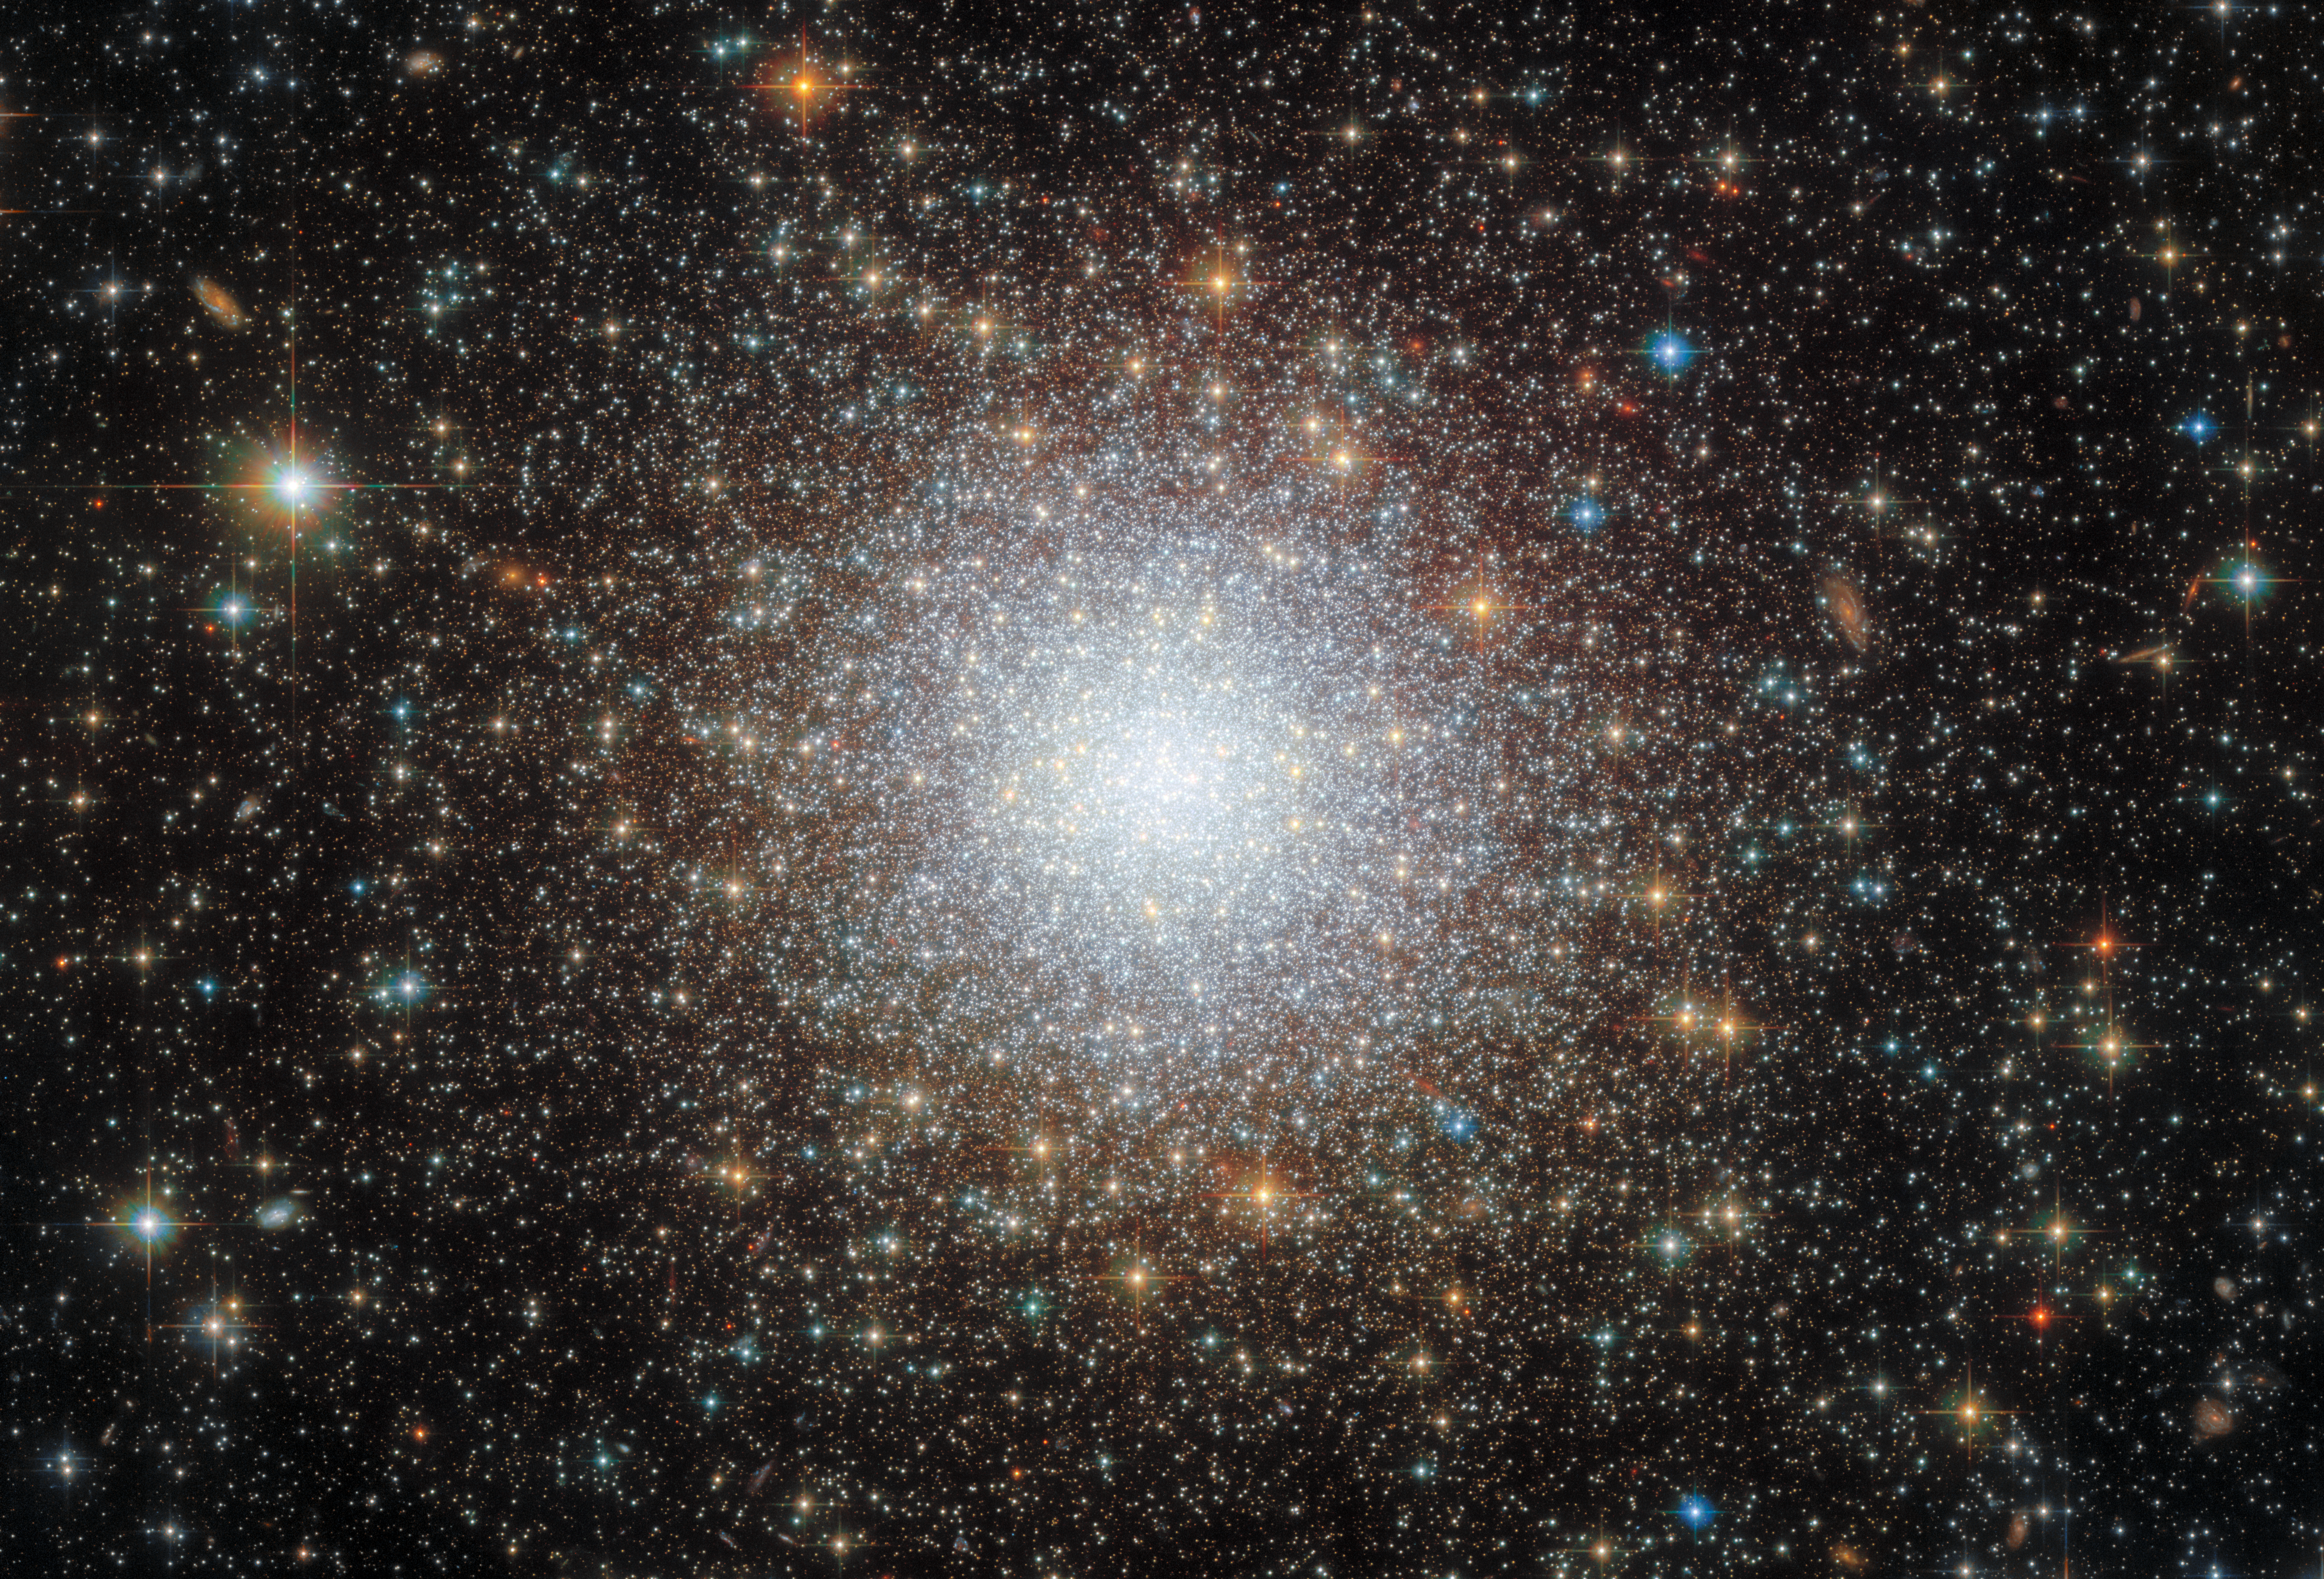

Cluster in the cloud

This striking image shows the densely packed globular cluster known as NGC 2210, which is situated in the Large Magellanic Cloud (LMC). The LMC lies about 157 000 light-years from Earth, and is a so-called satellite galaxy of the Milky Way, meaning that the two galaxies are gravitationally bound. Globular clusters are very stable, tightly bound clusters of thousands or even millions of stars. Their stability means that they can last a long time, and therefore globular clusters are often studied in order to investigate potentially very old stellar populations.

In fact, 2017 research that made use of some of the data that were also used to build this image revealed that a sample of LMC globular clusters were incredibly close in age to some of the oldest stellar clusters found in the Milky Way’s halo. They found that NGC 2210 specifically probably clocks in at around 11.6 billion years of age. Even though this is only a couple of billion years younger than the Universe itself, it made NGC 2210 by far the youngest globular cluster in their sample. All other LMC globular clusters studied in the same work were found to be even older, with four of them over 13 billion years old. This is interesting, because it tells astronomers that the oldest globular clusters in the LMC formed contemporaneously with the oldest clusters in the Milky Way, even though the two galaxies formed independently.

As well as being a source of interesting research, this old-but-relatively-young cluster is also extremely beautiful, with its highly concentrated population of stars. The night sky would look very different from the perspective of an inhabitant of a planet orbiting one of the stars in a globular cluster’s centre: the sky would appear to be stuffed full of stars, in a stellar environment that is thousands of times more crowded than our own.

Credit: ESA/Hubble & NASA, A. Sarajedini, F. Niederhofer